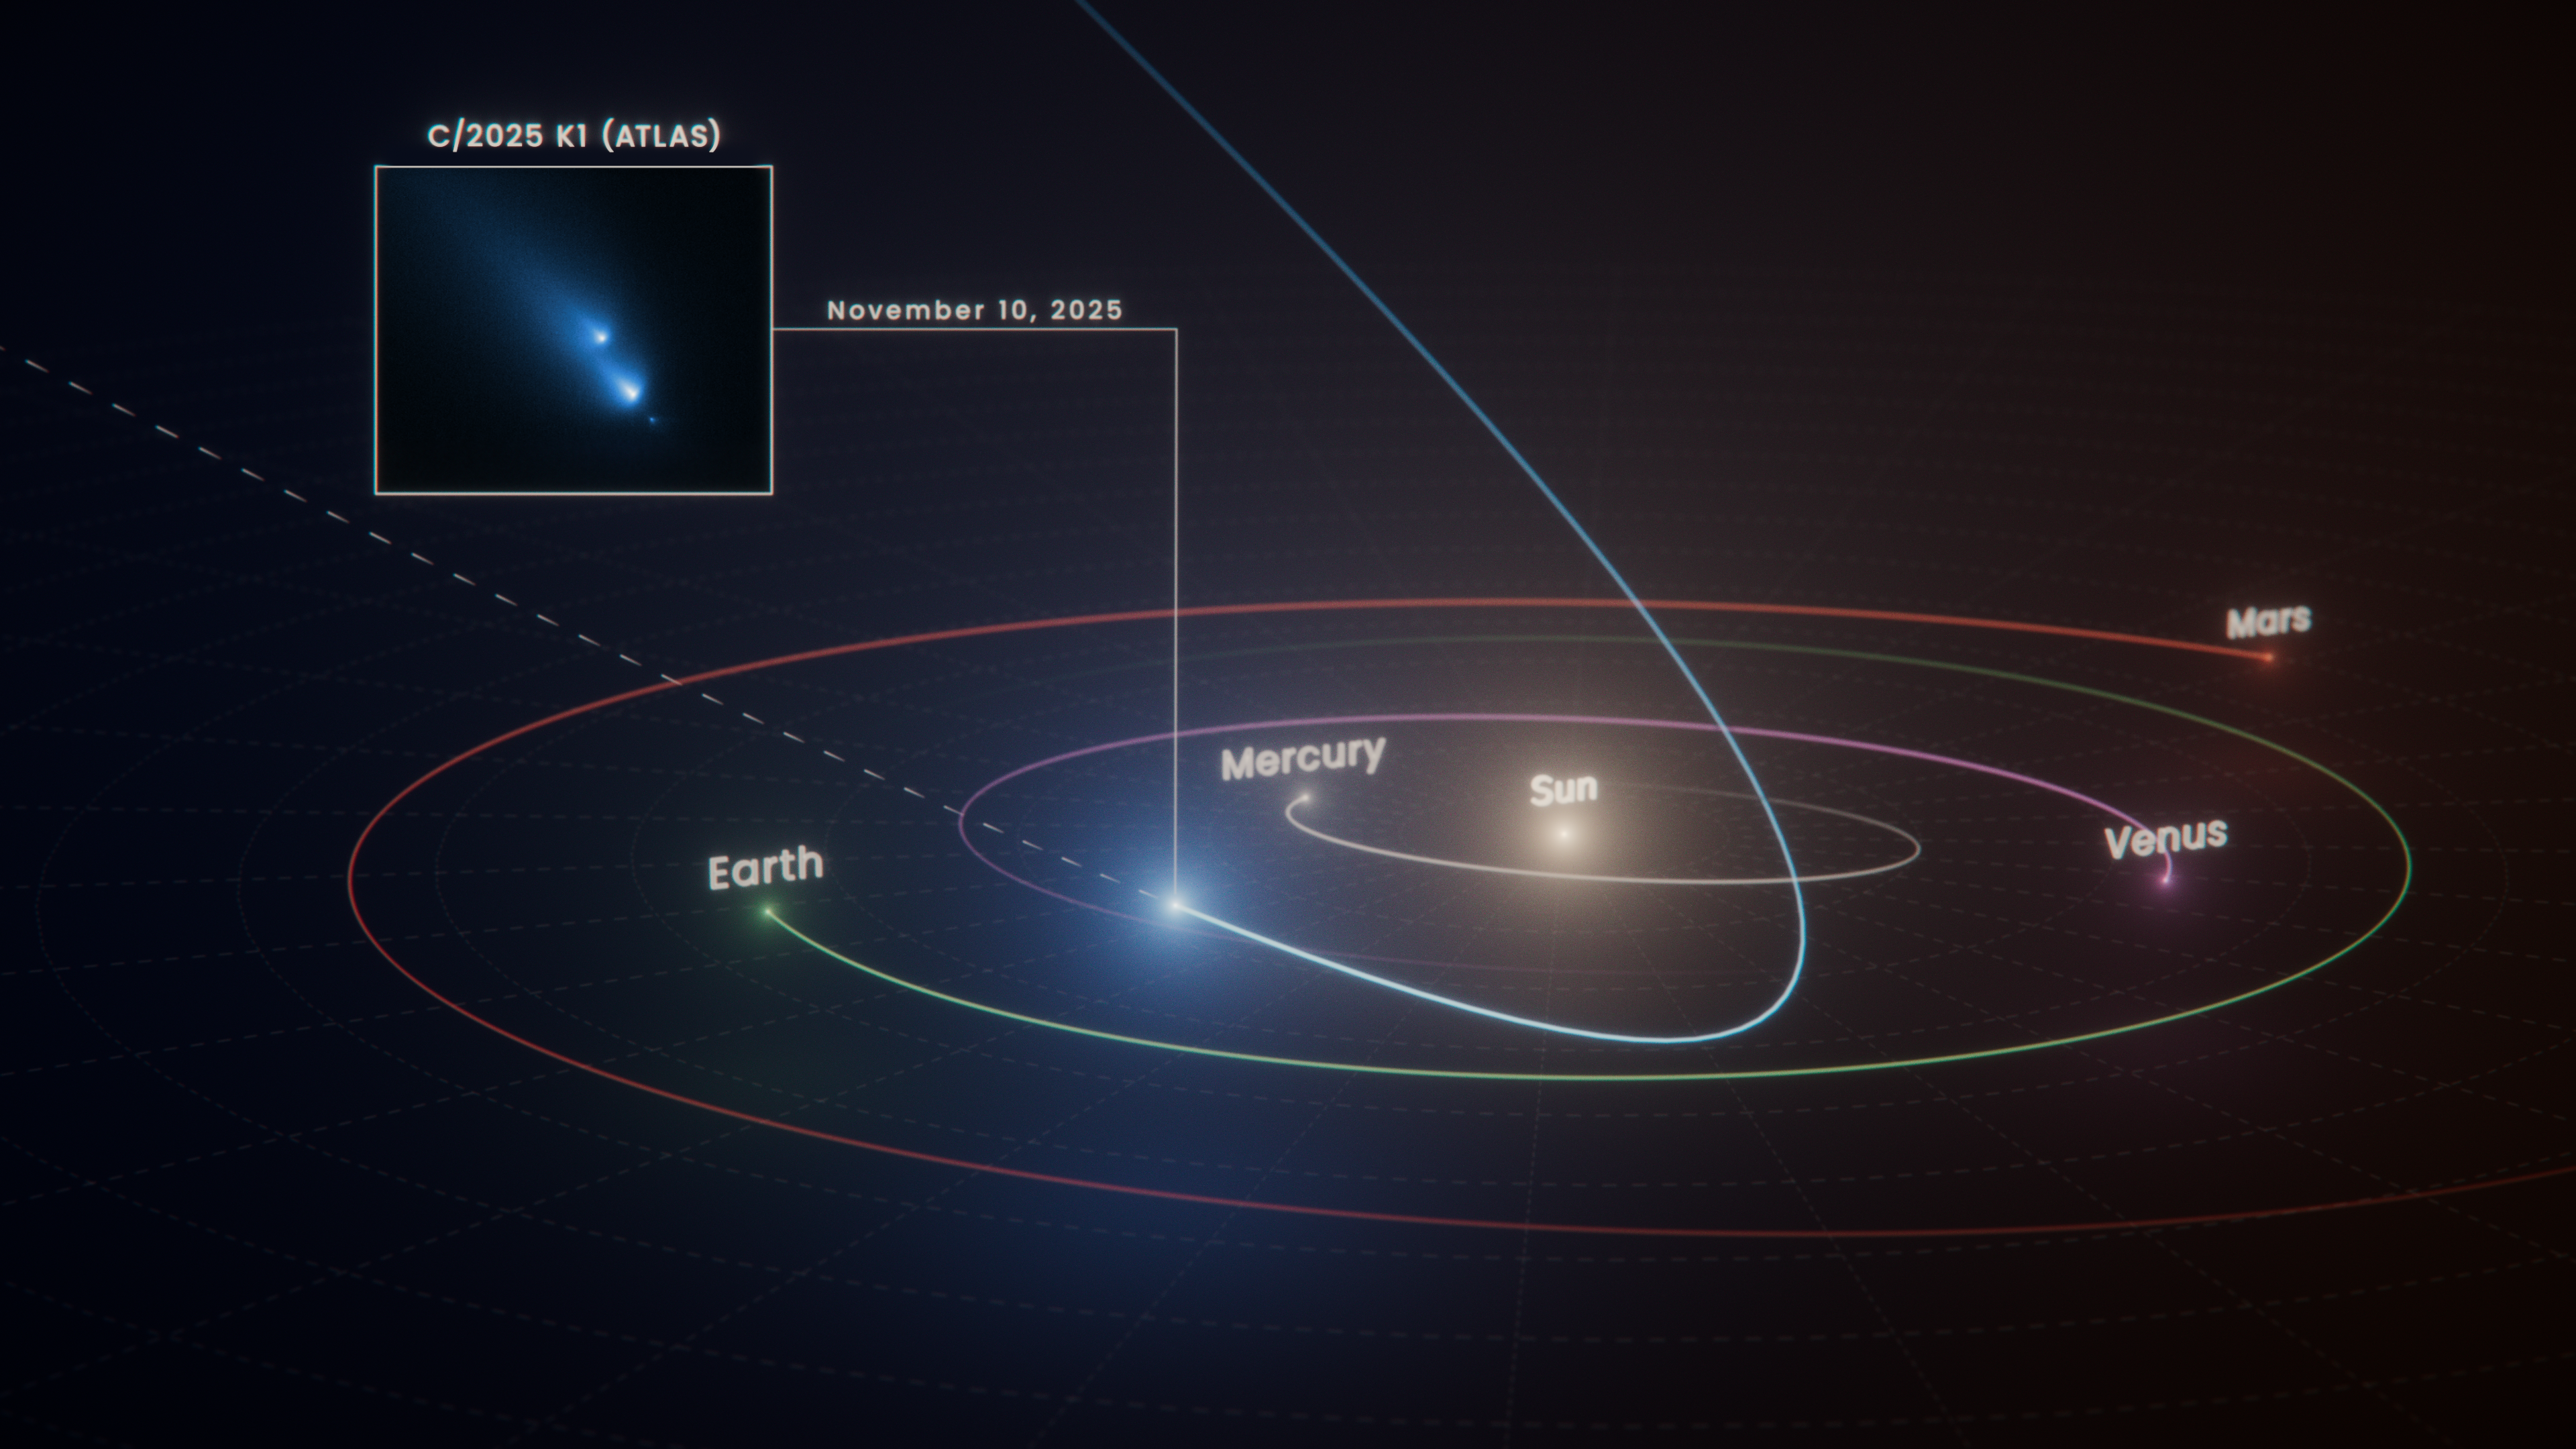

Illustration: Path of comet C/2025 K1 (ATLAS)

This diagram shows the path the long-period comet C/2025 K1 (ATLAS), or K1 for short, took as it swung past the Sun and began its journey out of the Solar System. On November 10, 2025, Hubble captured the inset image of the fragmenting comet. Hubble took this image just a month after K1’s closest approach to the Sun, called perihelion.

During perihelion, a comet experiences its most intense heating and maximum stress. Just past perihelion is when some long-period comets like K1 tend to fall apart. K1’s perihelion was inside Mercury’s orbit, about one-third the distance of the Earth from the Sun. This is the first time Hubble has witnessed a comet so early in the process of breaking up.

Credit: NASA, ESA, R. Crawford (STScI)